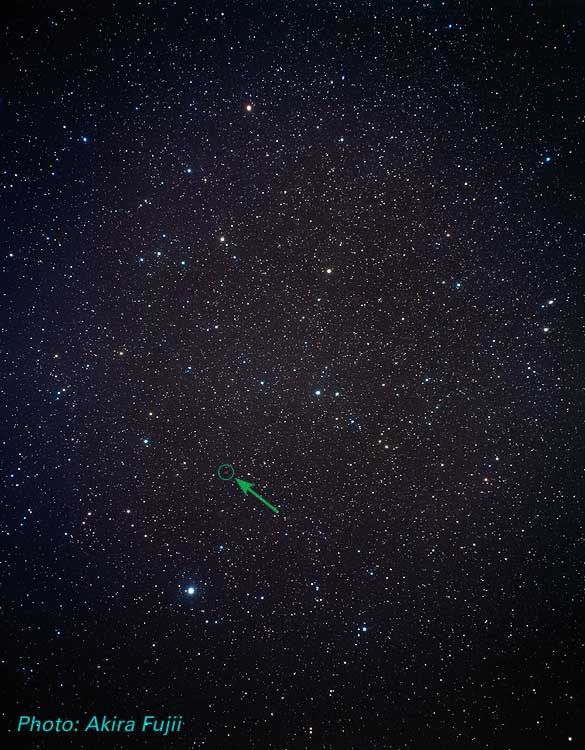

The Helix Nebula in the constellation Aquarius

Location of the Helix Nebula in the Constellation Aquarius (ground-based image).

Credit: Akira Fujii